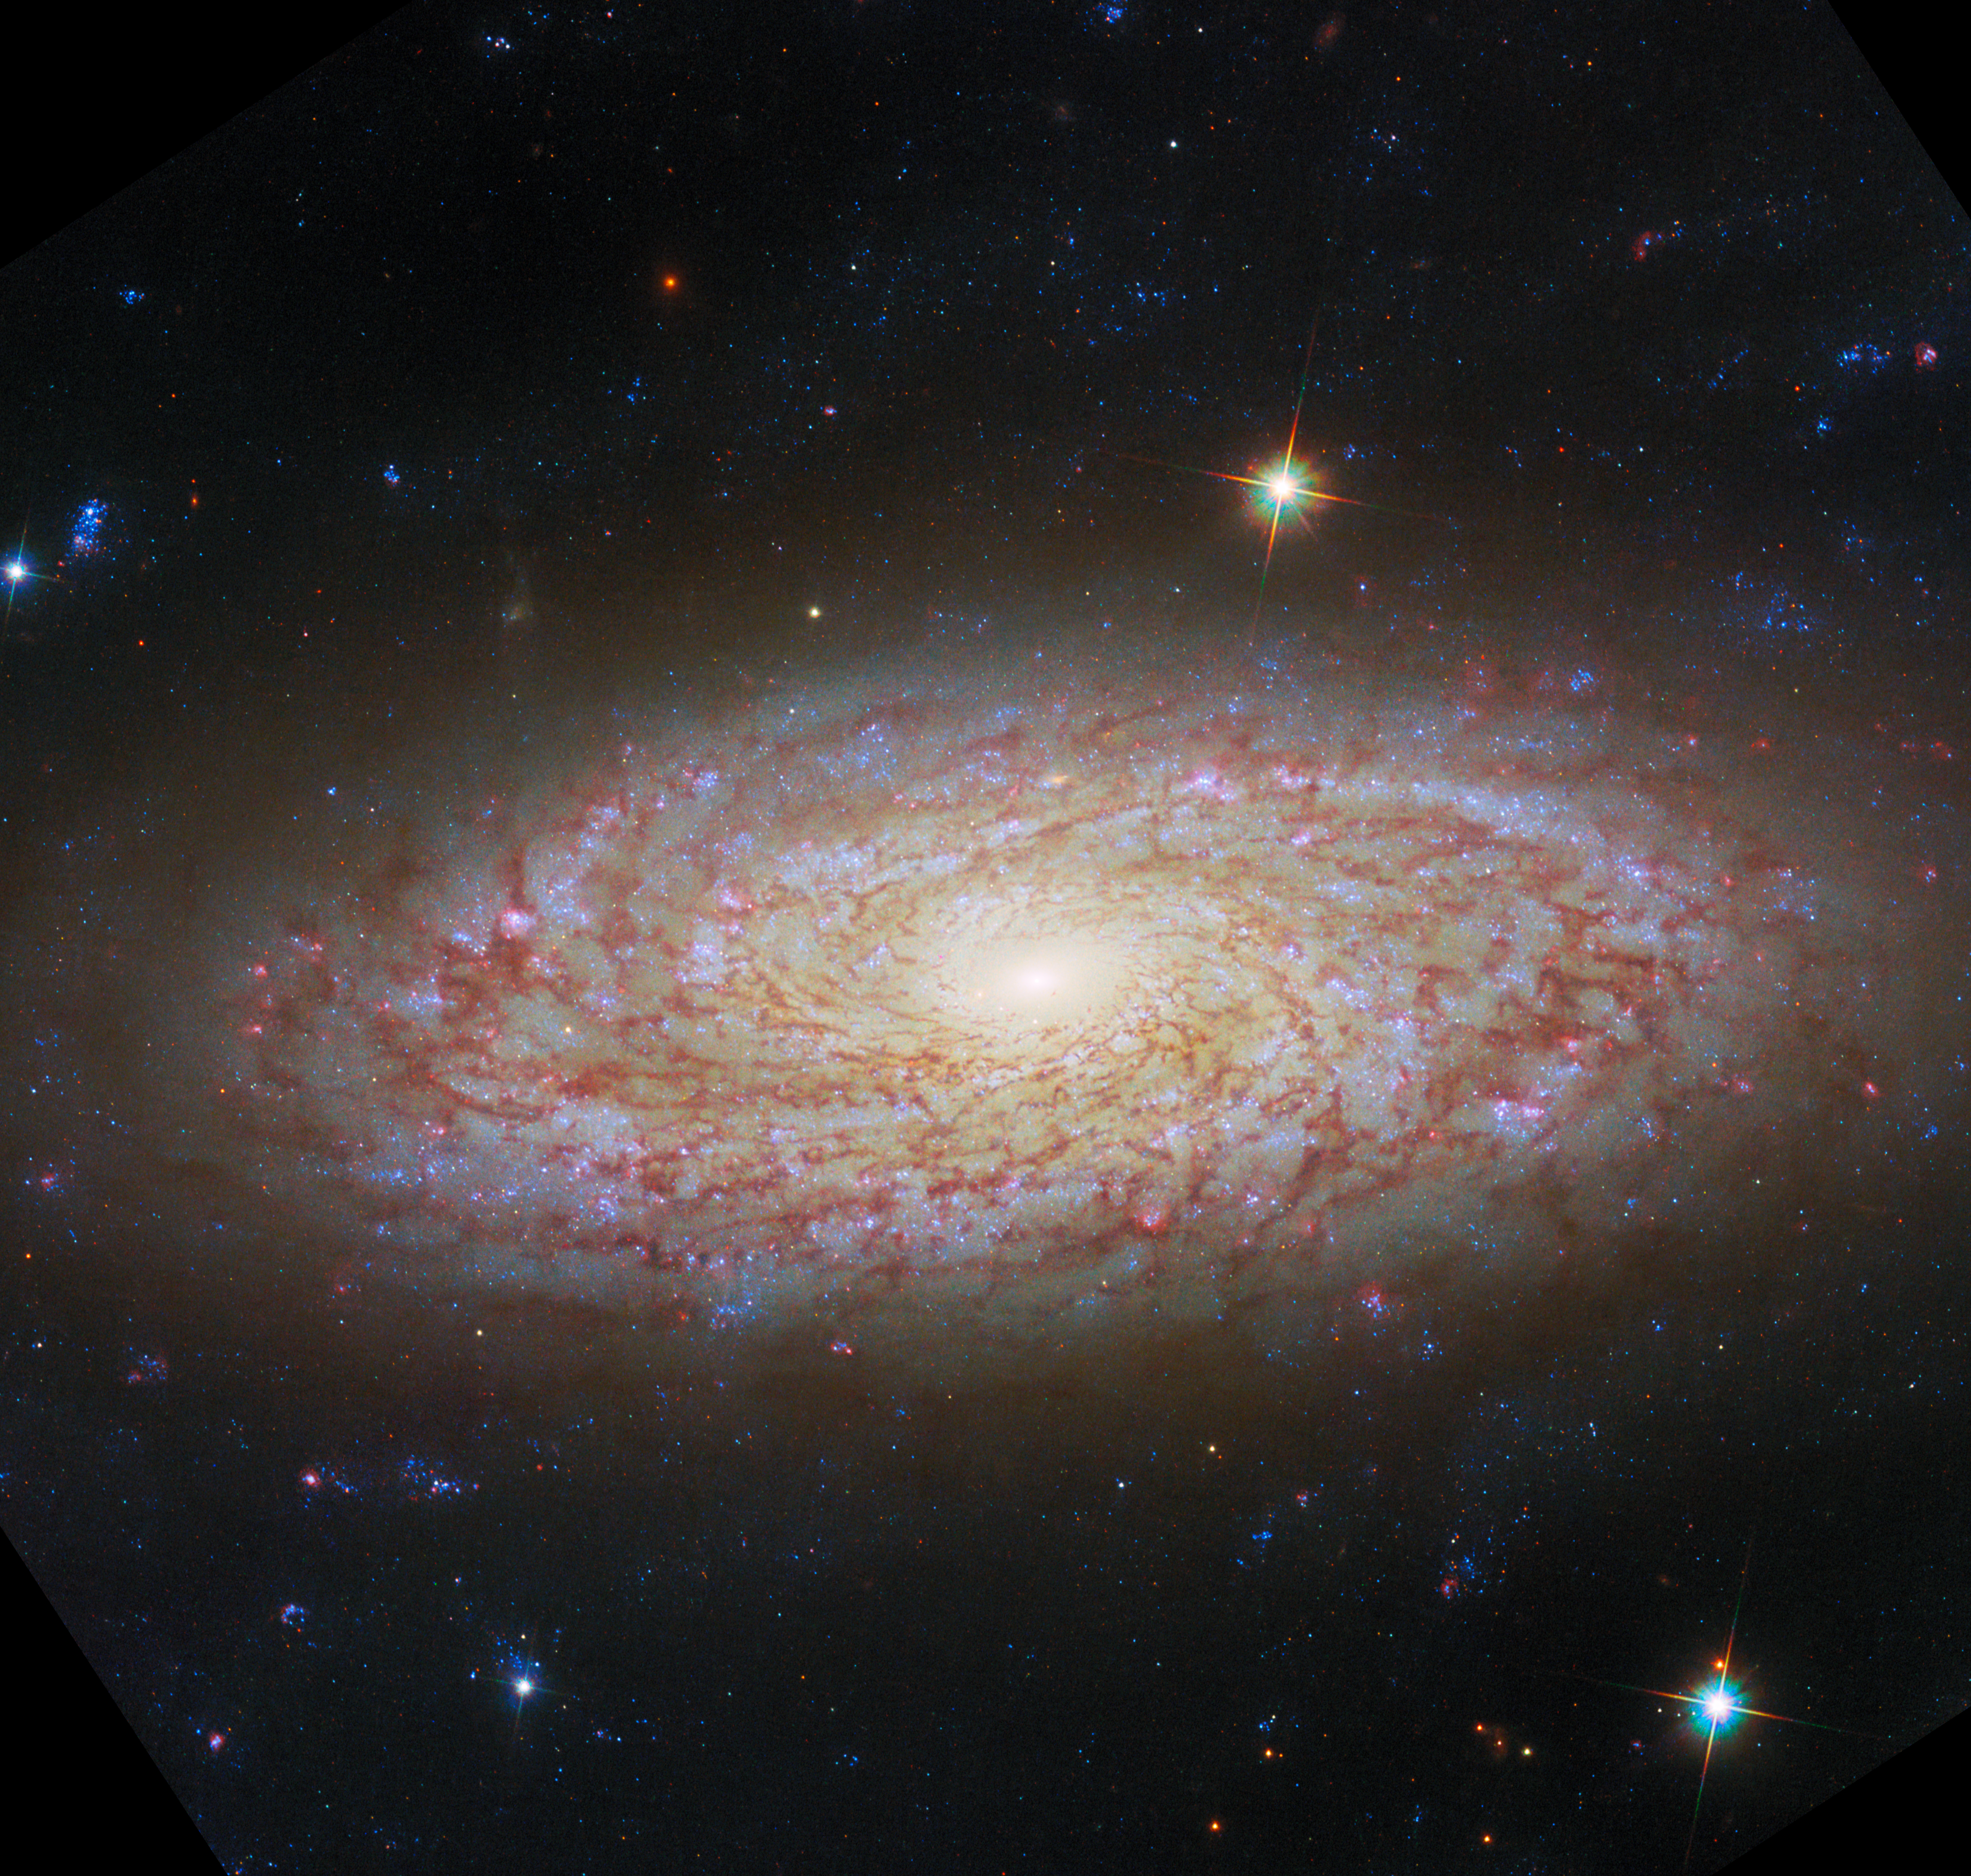

Viewing a flaky disc

Featured in this new NASA/ESA Hubble Space Telescope Picture of the Week is the spiral galaxy NGC 2090, located in the constellation Columba.

This galaxy is notable as a part of the group of galaxies studied in Hubble’s Extragalactic Distance Scale Key Project, which aimed to determine a new state-of-the-art value for the Hubble constant, one of the then-new telescope’s primary science goals. The contribution of NGC 2090 was in calibrating the Tully-Fisher (TF) distance method, by observing Cepheid variable stars in the galaxy. The Cepheid-based measurement from that study in 1998 put NGC 2090 as 37 million light-years away; the newest measurement from 2020, using the TF method, has NGC 2090 slightly farther away, at 40 million light-years.

Before and since that project, NGC 2090 has been well studied as a very prominent nearby example of star formation. It has been described as a flocculent spiral, meaning a spiral galaxy with a patchy, dusty disc and arms that are flaky or not visible at all. This Hubble image shows well why NGC 2090 earned that description, but its spiral arms do appear among the dust as winding lanes of light.

NGC 2090 is a galaxy still full of activity, with clusters of star formation at various stages of evolution spread across the disc. Examining star formation and the movement of matter in galaxies was the motivation for these Hubble observations, taken in October of this year.

This image has been adjusted slightly to compare with the image from Webb. See the original here.

Credit: ESA/Hubble & NASA, D. Thilker